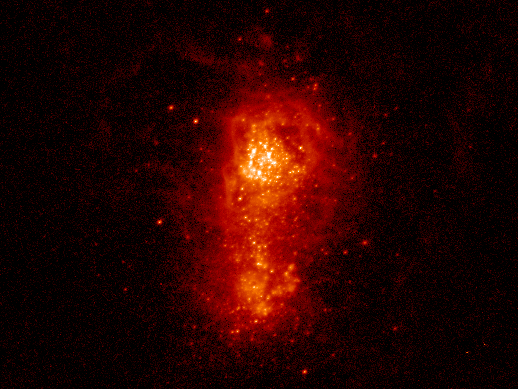

Hubble Shot of I Zw 18

The galaxy resides 30 million light-years away in the constellation Ursa Major. The observation was made in November 1994 and March 1995. The bright dots scattered throughout the image represent clusters of stars.

Credit: D. Hunter (Lowell Observ.) and A. Aloisi (JHU)